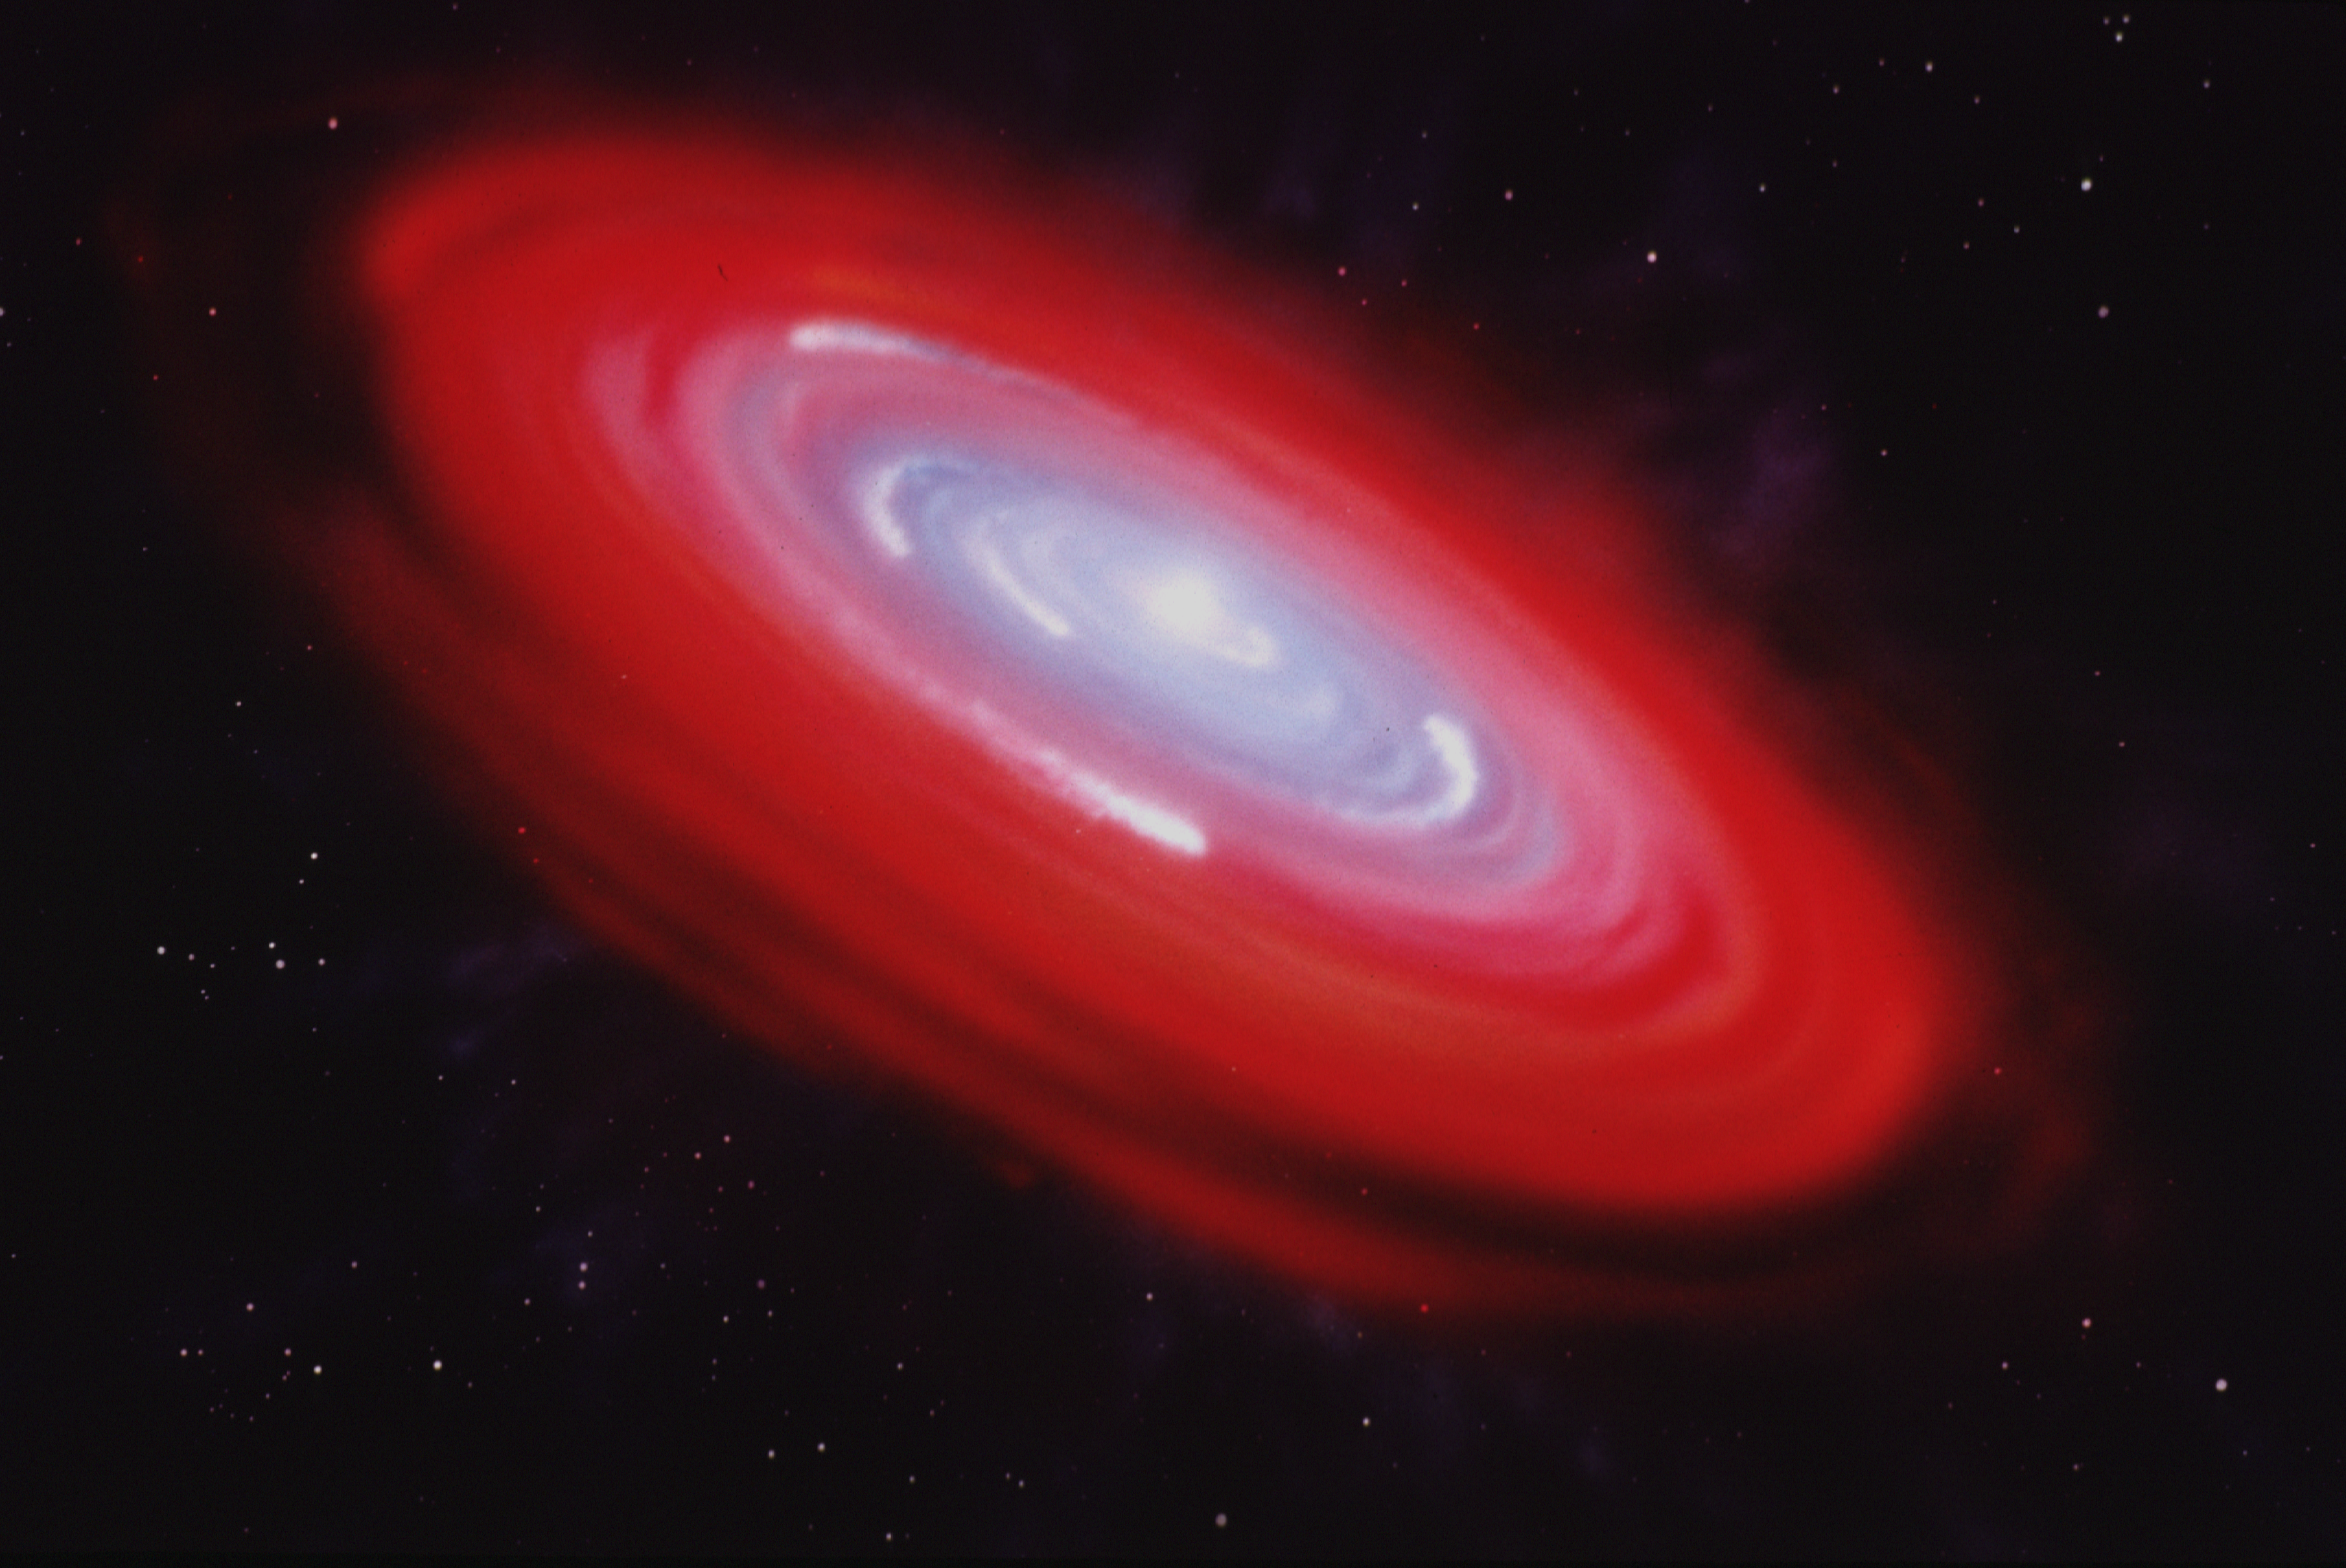

Artist's illustration of Beta Pictoris gas disk

This is an artist's concept of the near stellar environment of the star Beta Pictoris. This illustration is based upon recent observations made with the Goddard High Resolution Spectrograph aboard the Hubble Space Telescope.

This illustration shows three major components of the near stellar region, which is roughly the size of our inner Solar System. The reddish center ring (C) is a diffuse gas disk, which has a stable orbit around the star. This ring surrounds an inner disk (D) of gas which is slowly drifting toward the star. The white "comet-like" features in this bluish disk are dense streams of gas spiraling down the star gravitational potential "well." The outer filamentary structures (A&B;), first detected by the Space Telescope, may be an expanding gas halo, or foreground features seen in the local interstellar medium.

Credit: Dana Berry (STScI)